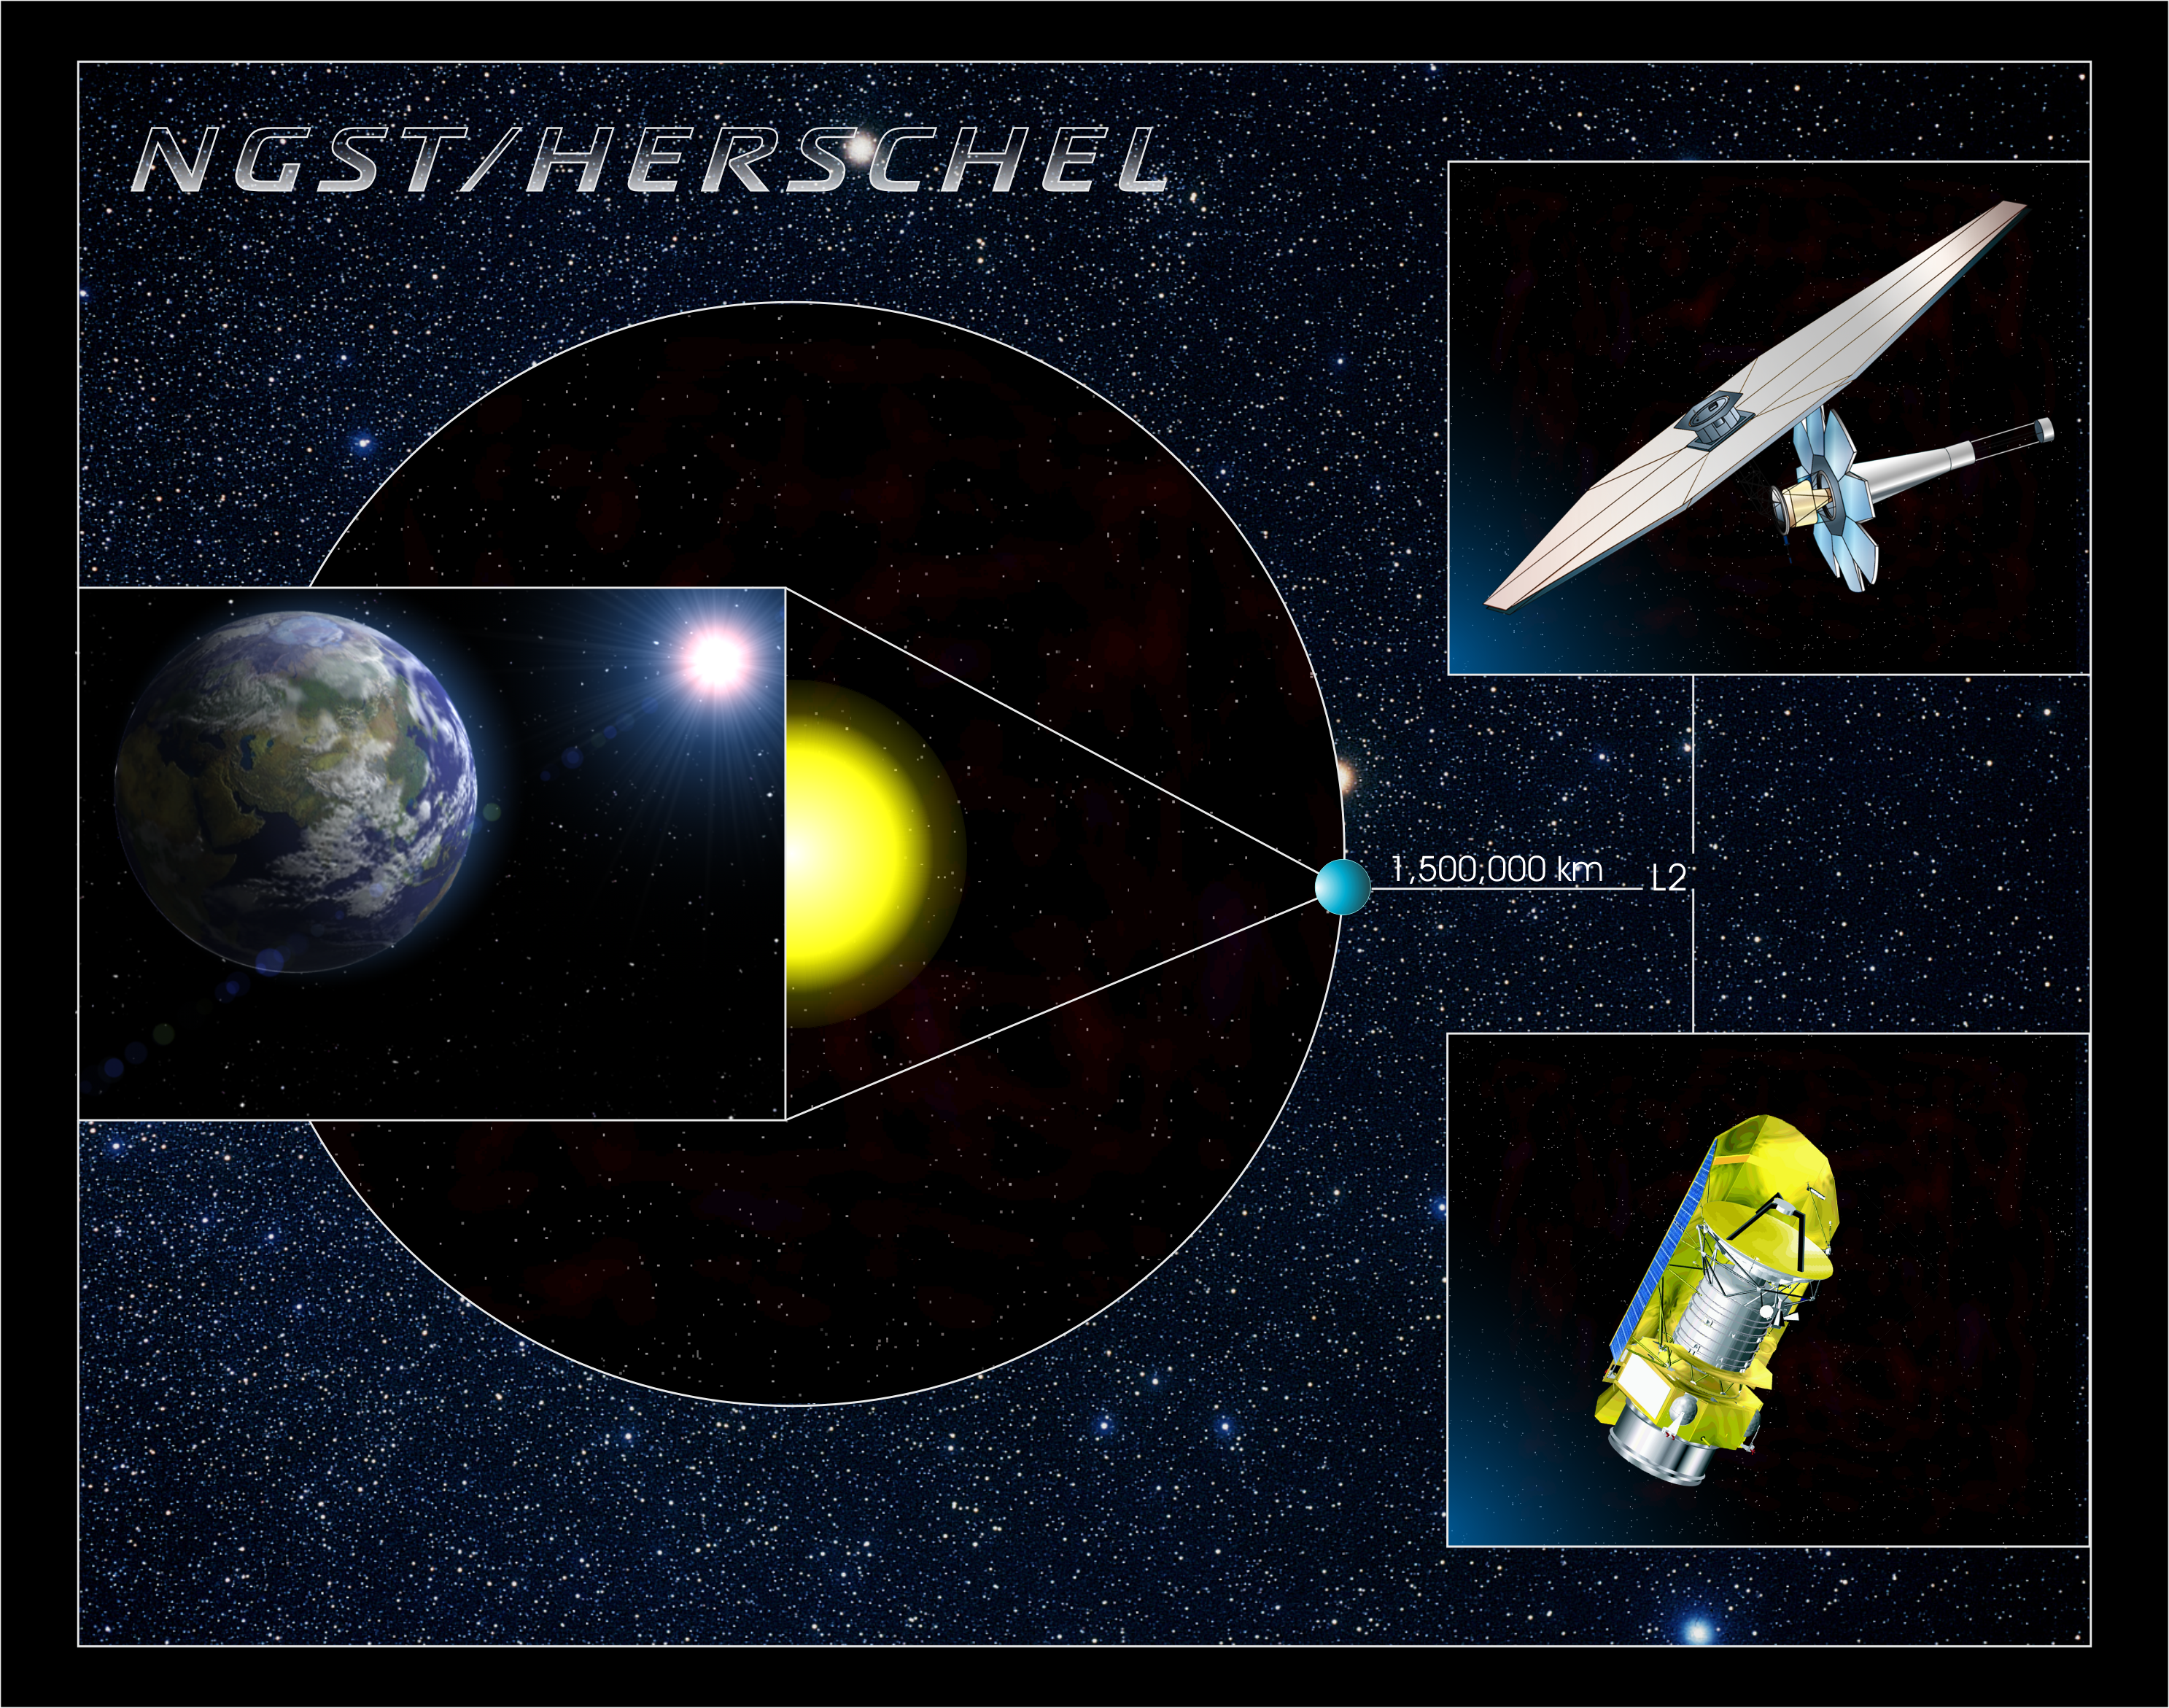

The James Webb Space Telescope and Herschel

This image shows the orbits of both the JWST and Herschel space telescopes. They will both orbit at the Earth-Sun L2 point.

Credit: ESA